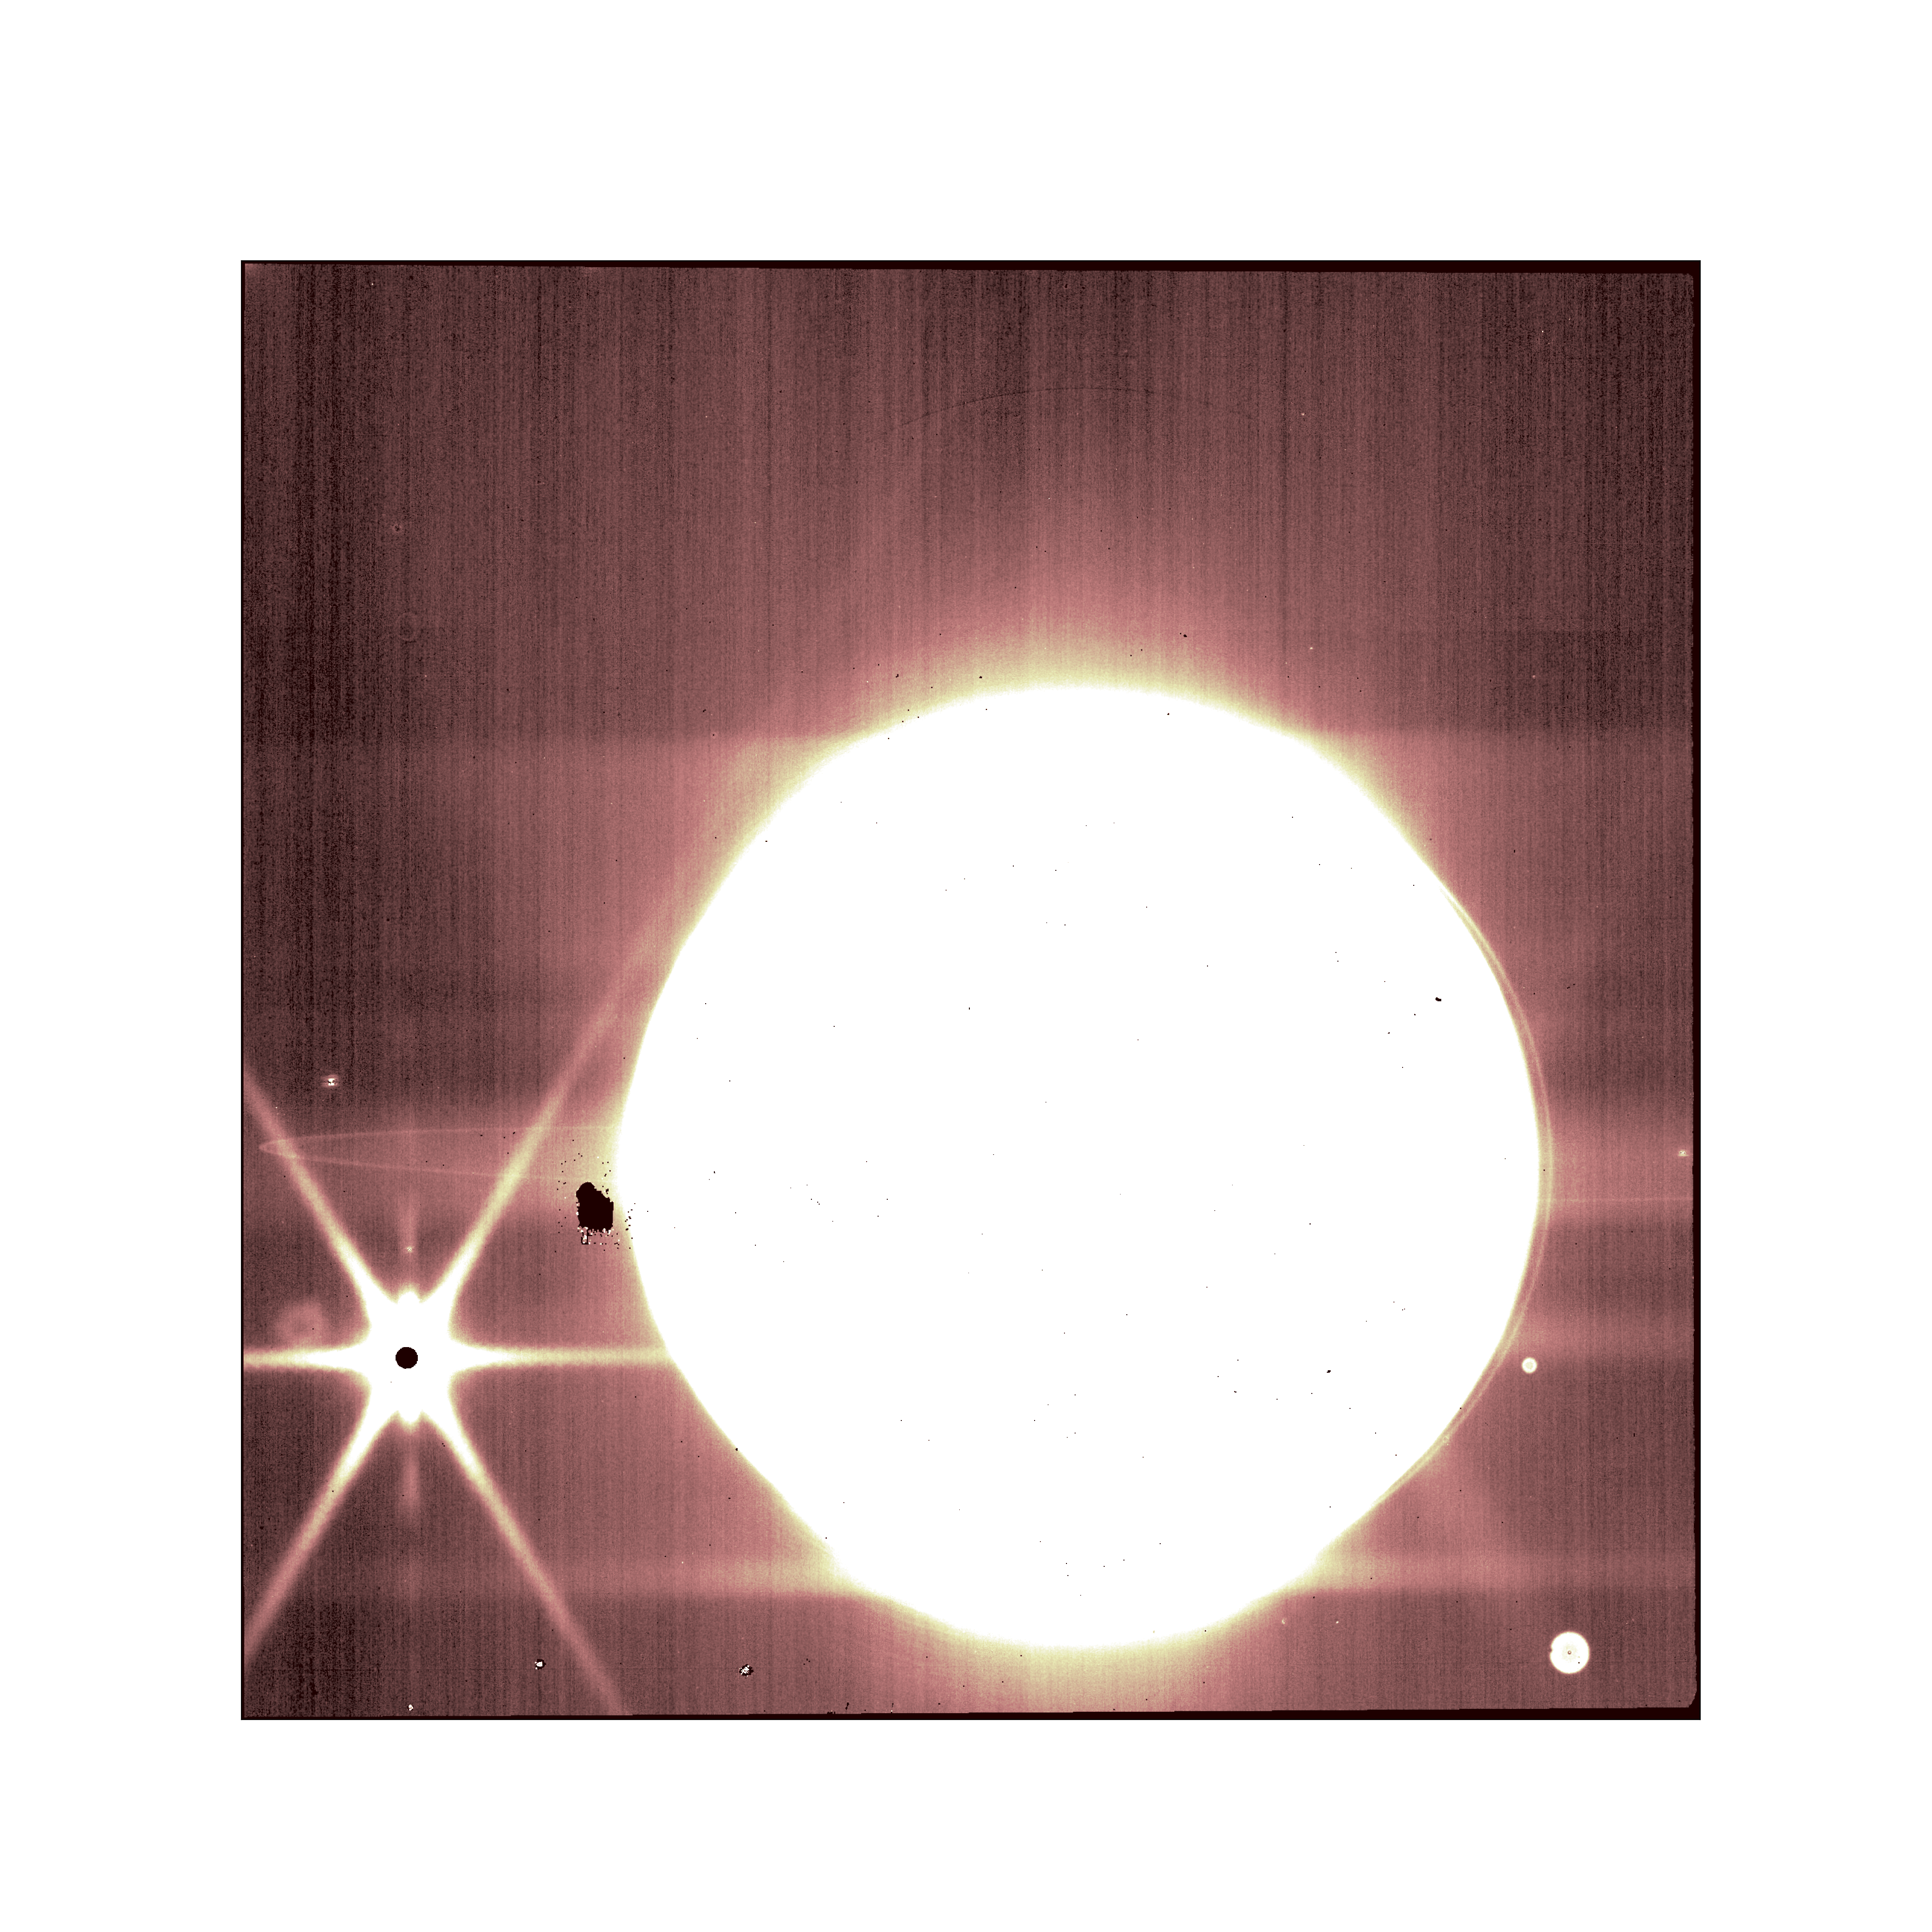

Jupiter’s Rings And Moons (NIRCam) Commissioning Image

Jupiter and some of its moons (including Europa on the left) are seen through NIRCam’s 3.23 micron filter in this image from the NASA/ESA/CSA James Webb Space Telescope.

Additionally, Webb easily captured some of Jupiter’s rings, which especially stand out in the NIRcam long-wavelength filter image, to the delight of scientists.

Credit: NASA/ESA/CSA/STScI